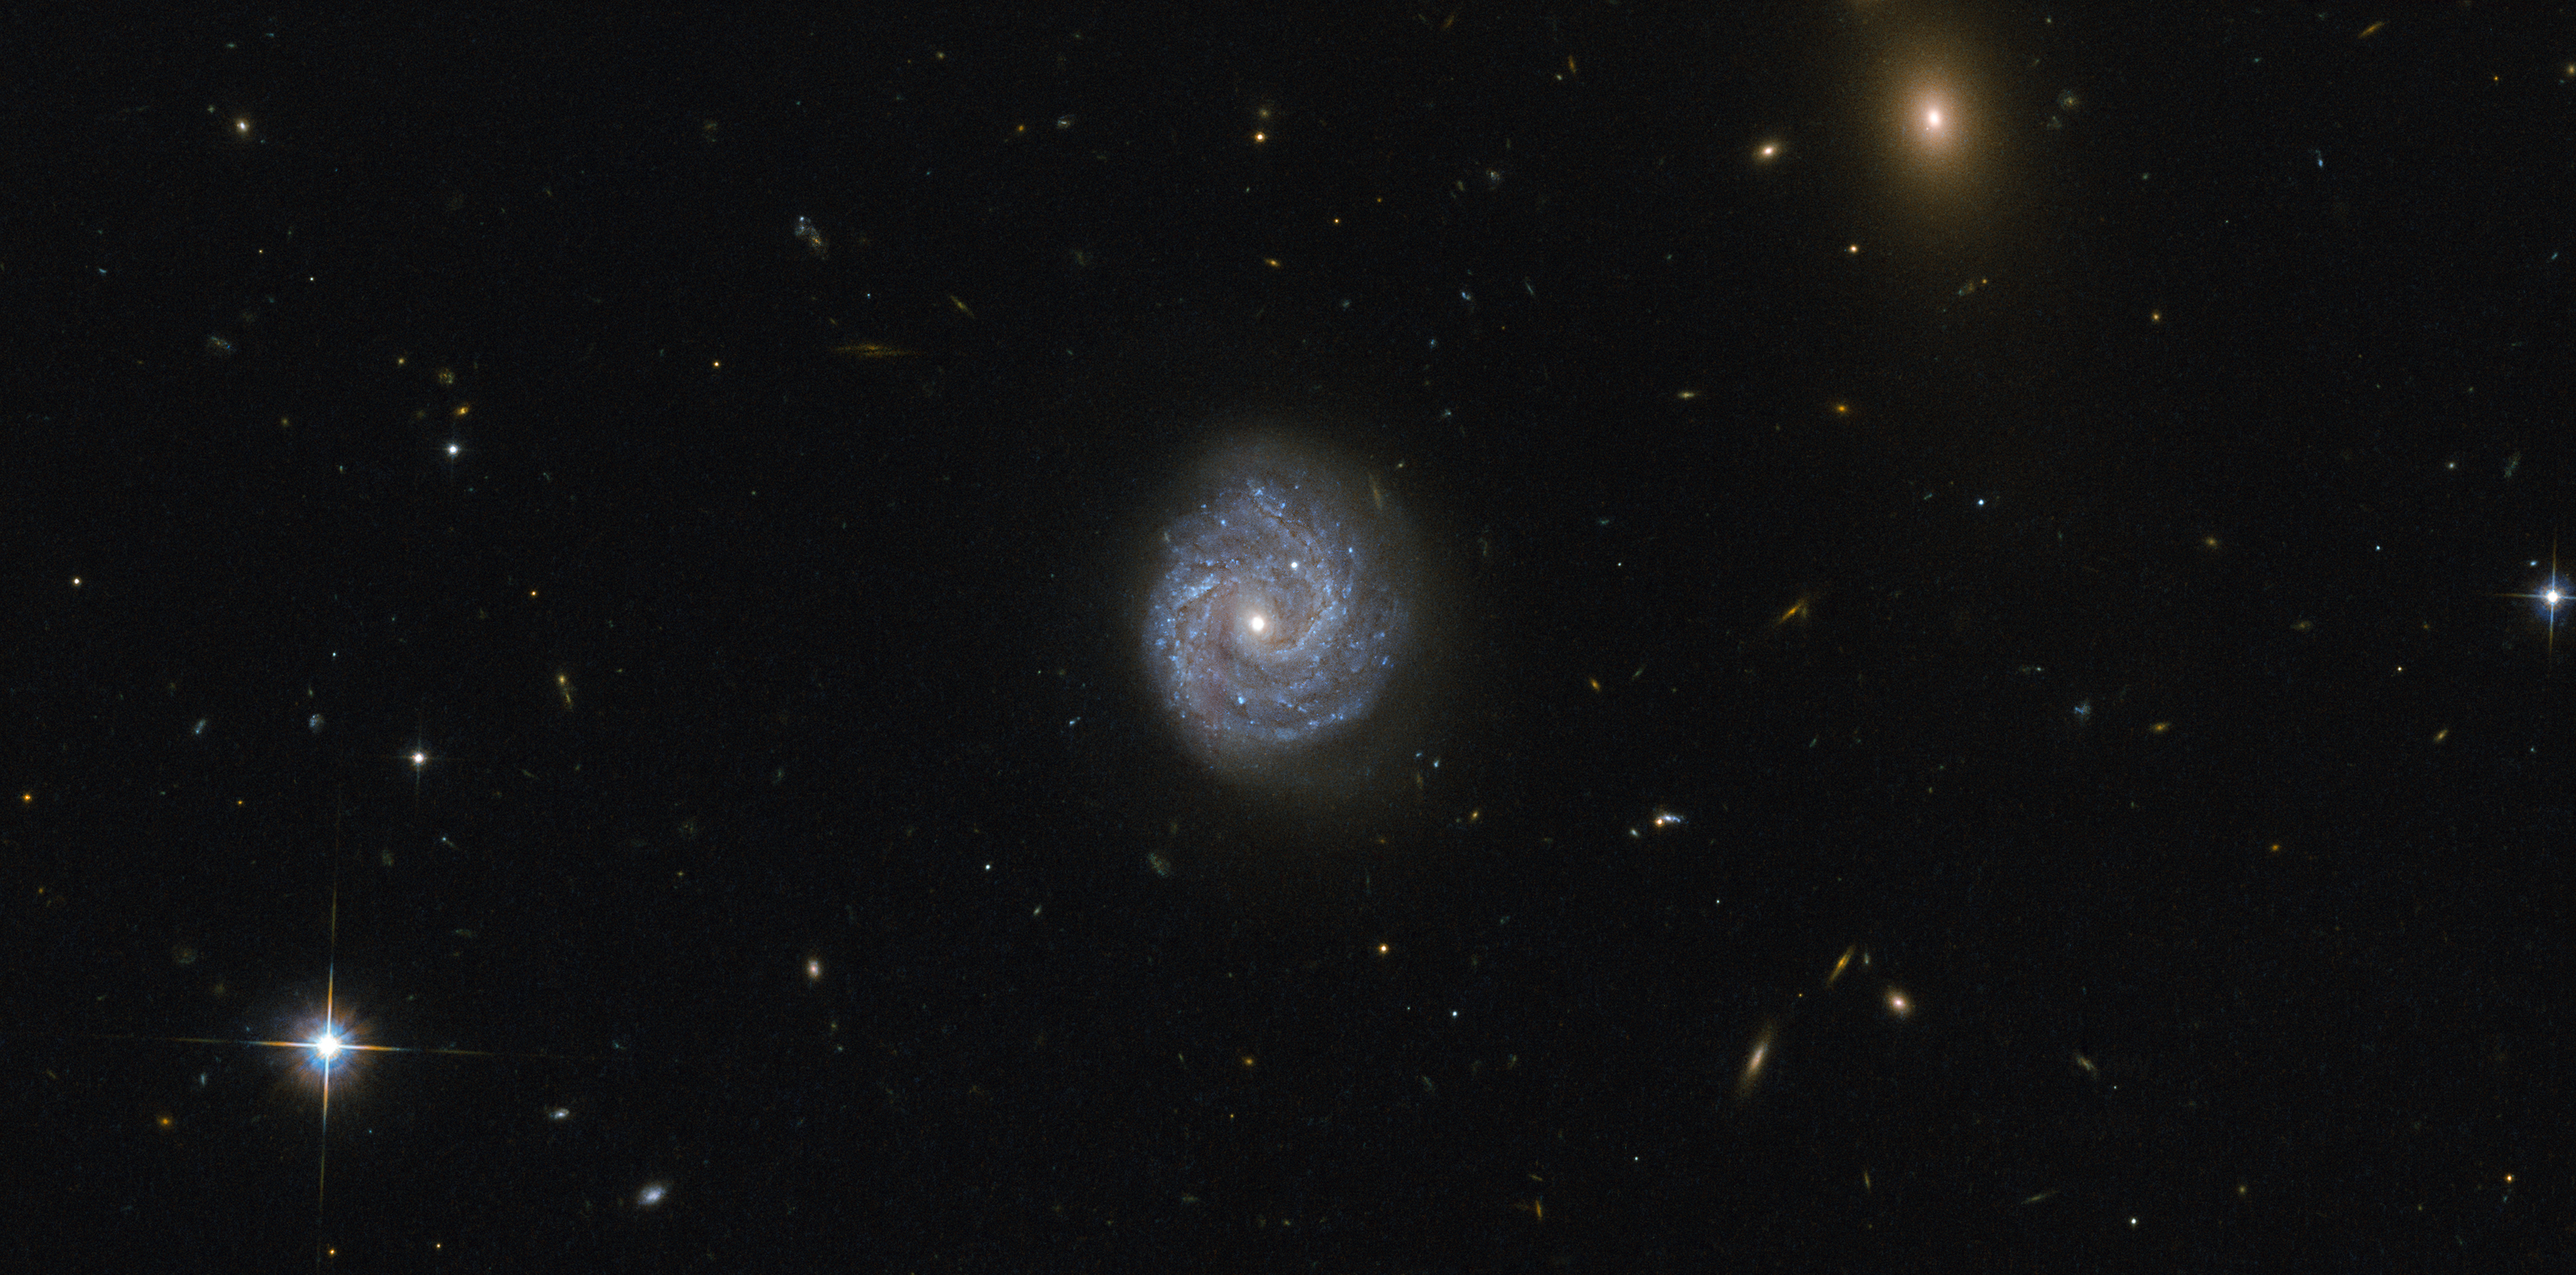

A black hole of puzzling lightness

This image taken with the Advanced Camera for Surveys (ACS) onboard the NASA/ESA Hubble Space Telescope captures a galaxy in the Virgo constellation. This camera was installed in 2002, and its wide field of view is double that of its predecessor, capturing superb images with sharp image quality and enhanced sensitivity that can be seen here.

The beautiful spiral galaxy visible in the centre of the image is catchily known as RX J1140.1+0307, and it presents an interesting puzzle. At first glance, this galaxy appears to be a normal spiral galaxy, much like the Milky Way, but first appearances can be deceptive!

The Milky Way galaxy, like most large galaxies, has a supermassive black hole at its centre, but some galaxies are centred on lighter, intermediate-mass black holes. RX J1140.1+0307 is such a galaxy — in fact, it is centred on one of the lowest black hole masses known in any luminous galactic core. What puzzles scientists about this particular galaxy is that the calculations don’t add up. With such a relatively low mass for the central black hole, models for the emission from the object cannot explain the observed spectrum; unless there are other mechanisms at play in the interactions between the inner and outer parts of the accretion disc surrounding the black hole.

Credit: ESA/Hubble & NASA
Acknowledgement: Judy Schmidt